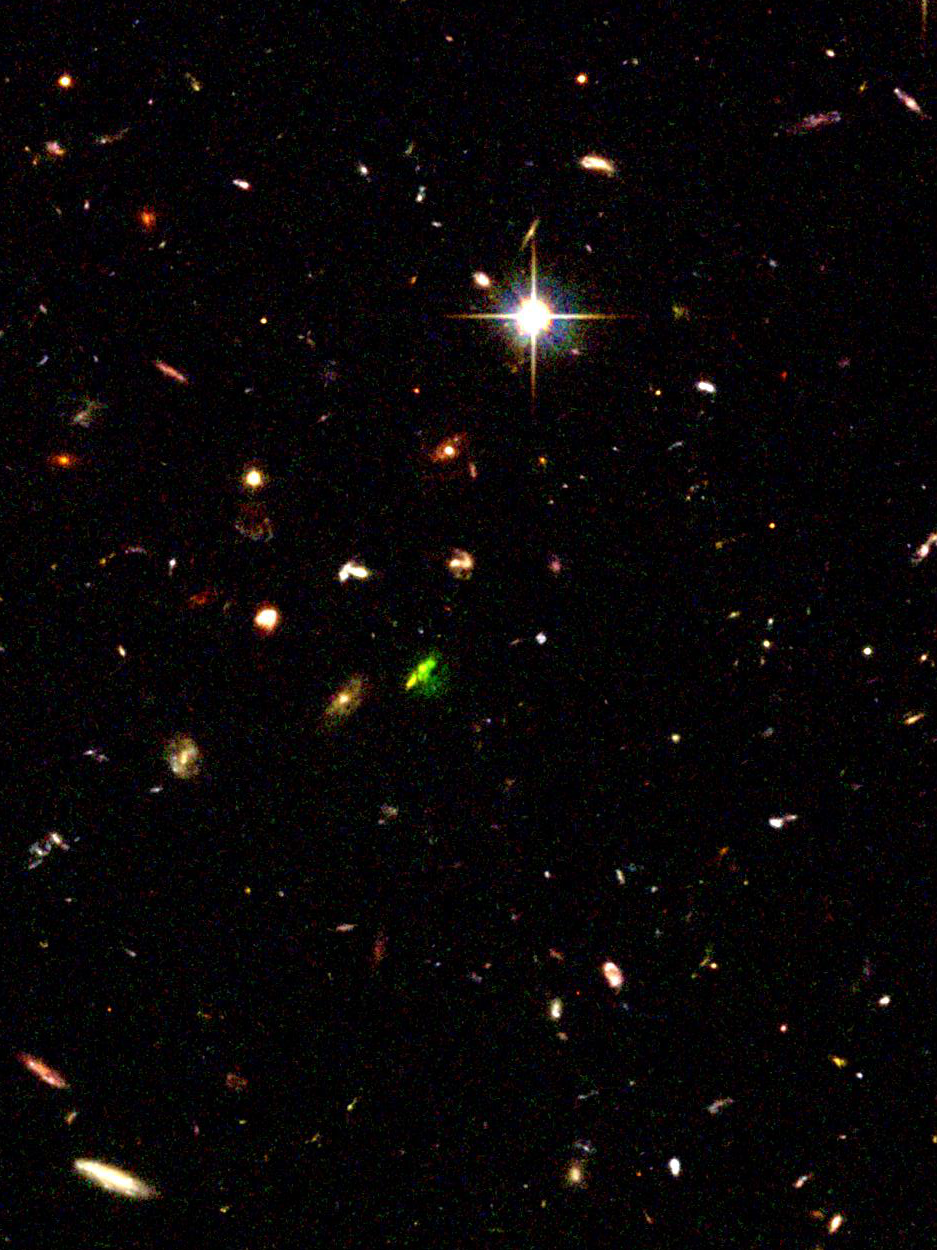

The cluster TNJ1338-1942 (overview)

In this image astronomers are seeing an embryonic cluster as it was when the universe was 1.5 billion years old. The young system, called TNJ1338-1942, is the most distant known developing cluster, or proto-cluster. It is dominated by a massive "baby galaxy" - the green object in the centre. The galaxy is producing powerful radio emissions, and is the brightest galaxy in the proto-cluster. The green colour indicates that the galaxy is emitting glowing hydrogen gas. Its clumpy appearance suggests that it is still in the process of forming. Smaller developing galaxies are scattered around the massive galaxy. The galaxy on the left of the massive galaxy is a foreground galaxy. The bright object in the upper half of the image is a foreground star.

This colour-composite image was assembled from observations taken between July 8 and 12, 2002 by the ACS Wide Field Camera.

Credit: NASA, ESA, G. Miley (Leiden Observatory) and R. Overzier (Leiden Observatory)